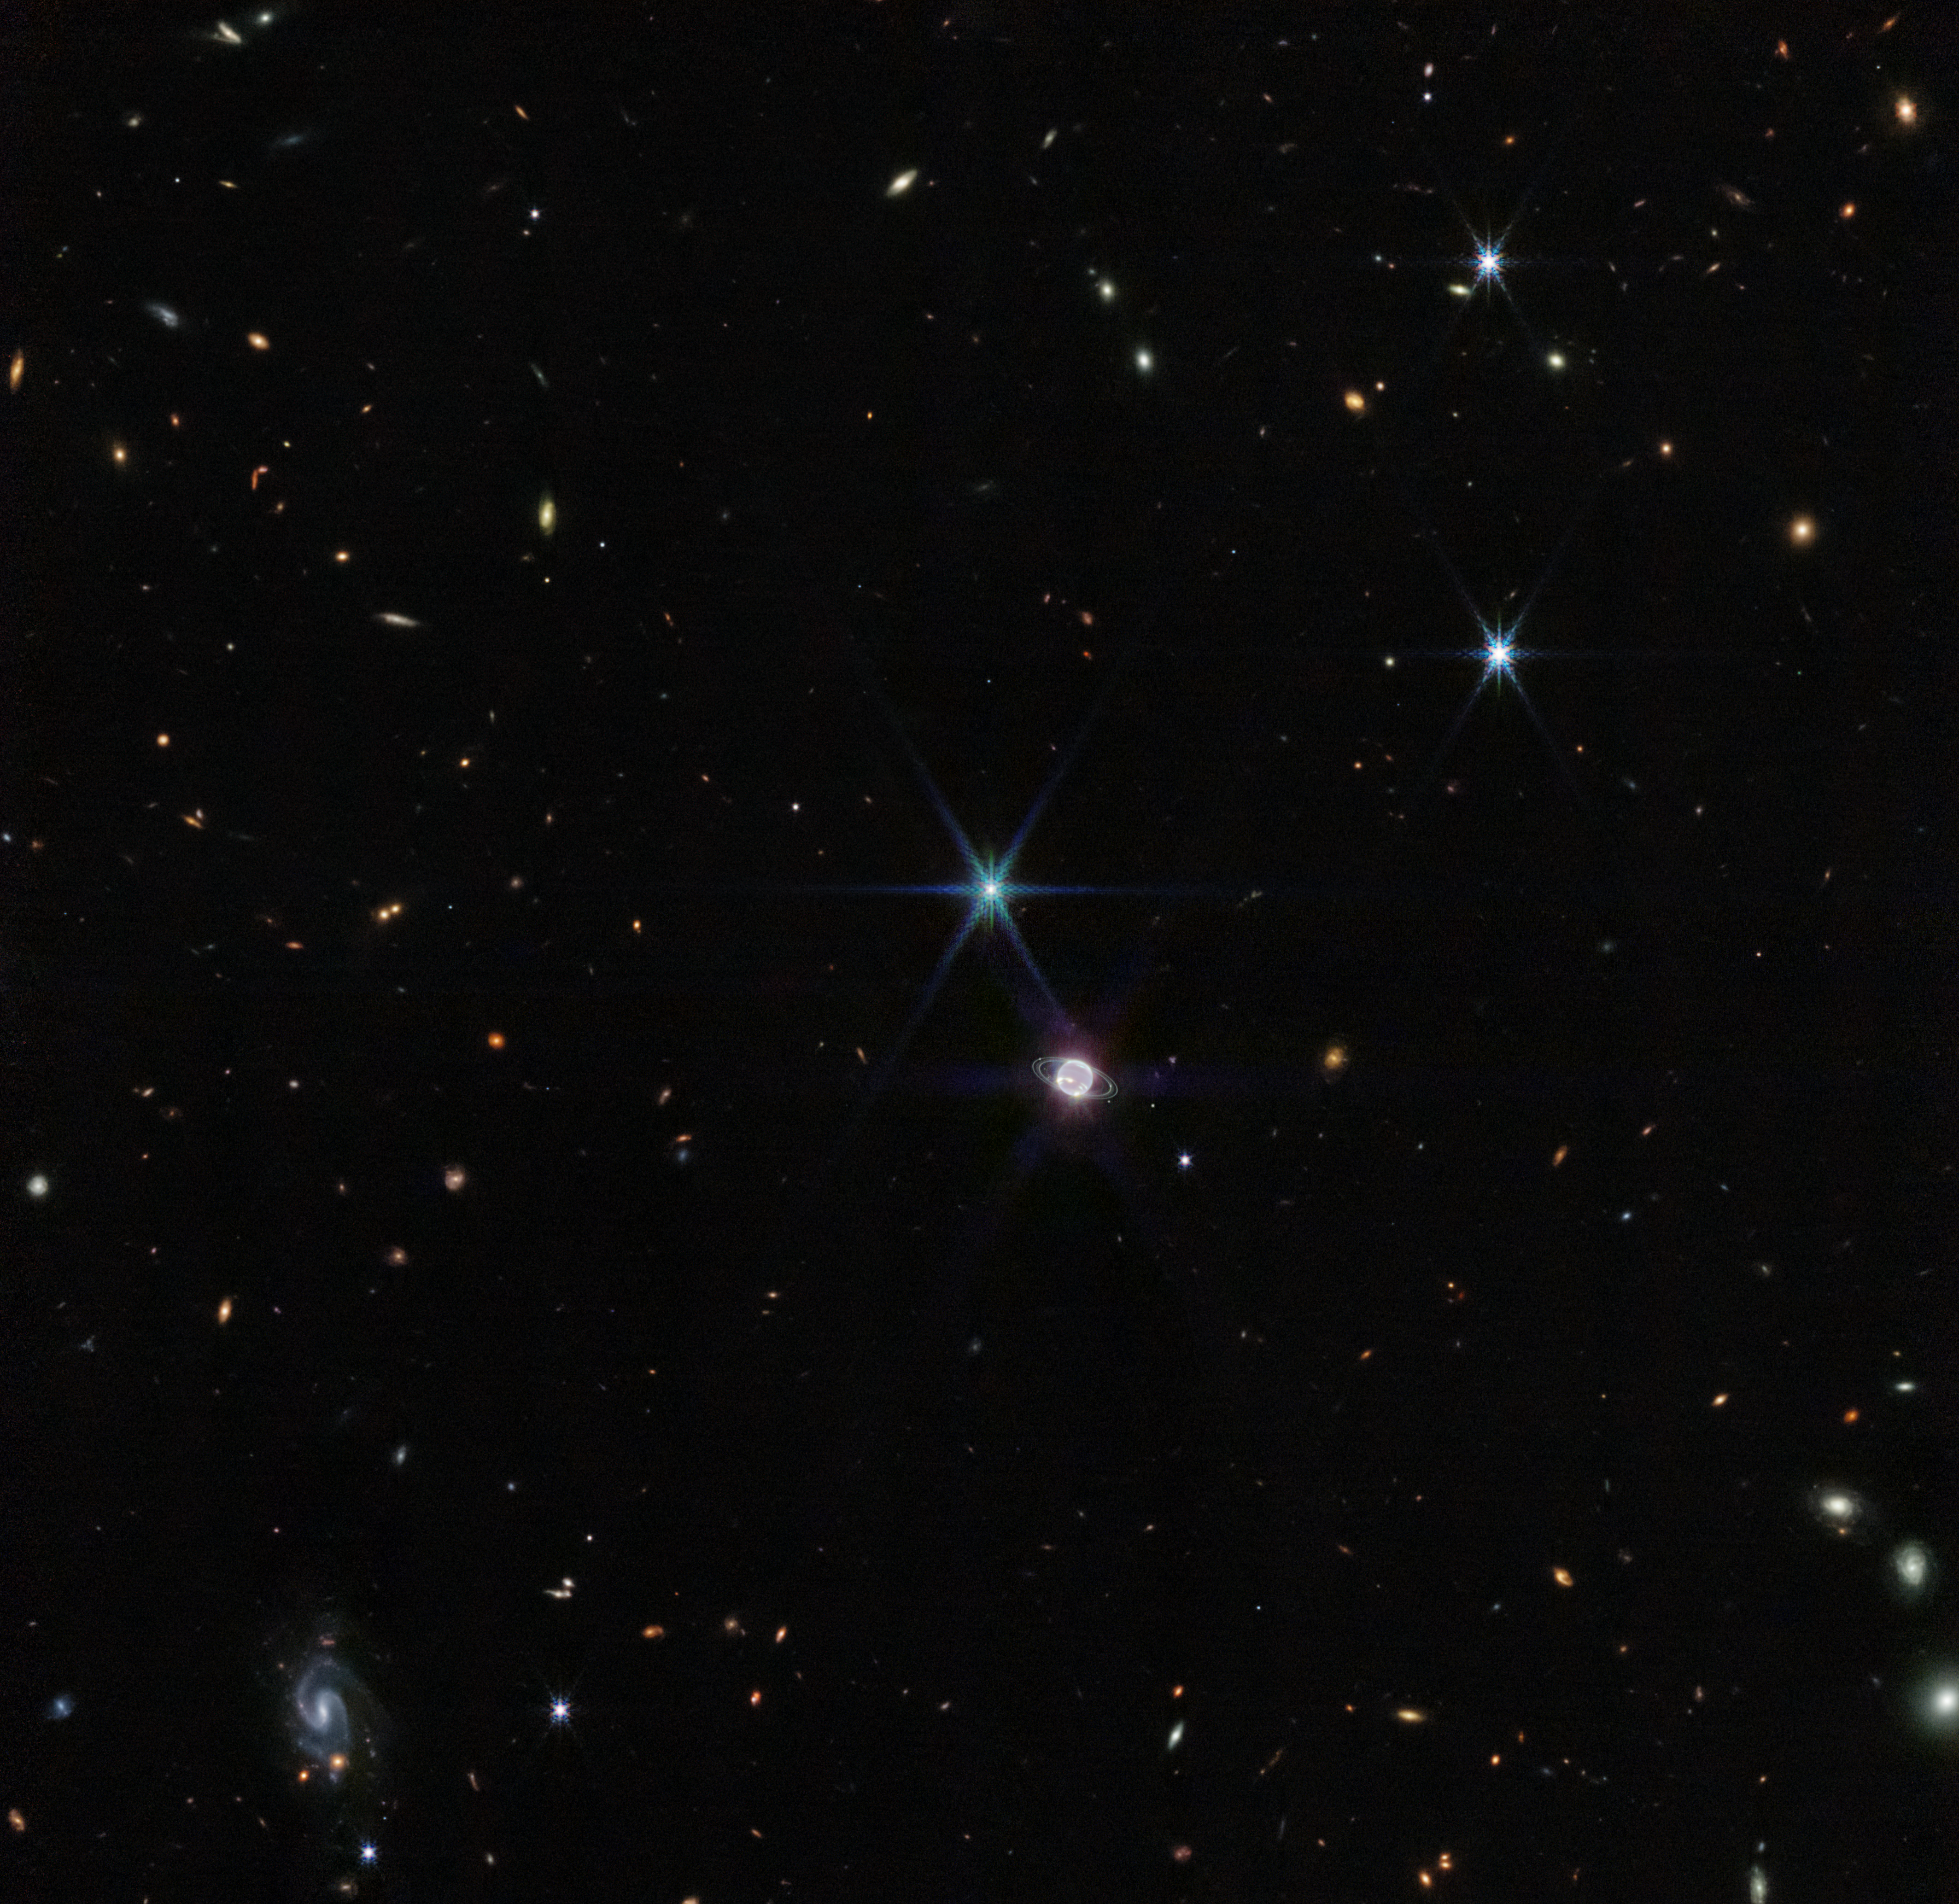

Neptune Wide-Field (NIRCam Image)

In this image by Webb’s Near-Infrared Camera (NIRCam), a smattering of hundreds of background galaxies, varying in size and shape, appear alongside the Neptune system.

Neptune, when compared to Earth, is a big planet. If Earth were the size of a nickel, Neptune would be as big as a basketball. In most portraits, the outer planets of our solar system reflect this otherworldly size. However, Neptune appears relatively small in a wide field of the vast universe.

Towards the bottom left of this image, a barred spiral galaxy comes into focus. Scientists say this particular galaxy, previously unexplored in detail, is about 1,200 million light years away. These types of galaxies at this relative difference are typically dominated by young stars that appear blueish in these wavelengths.

Credit: NASA, ESA, CSA, and STScI